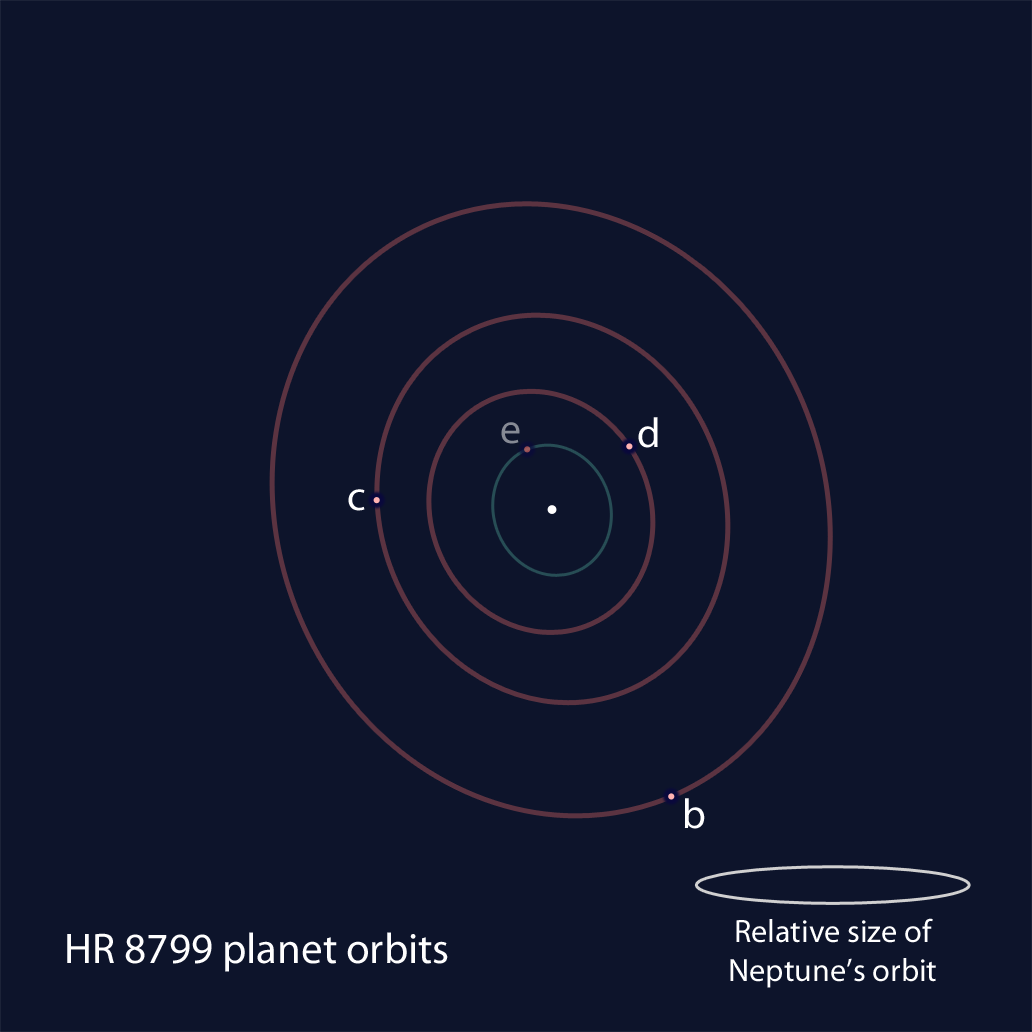

Positional schmatic of the members of the HR 8799 exoplanet system

This is an illustration of the HR 8799 exoplanet system based on the reanalysis of Hubble NICMOS data and ground-based observations. The positions of the star and the orbits of the four known planets are shown schematically. The sizes of the dots are not to scale with the planet's true sizes. The three outermost planets, b, c, and d, are detected in both the NICMOS and ground-based data. A fourth, inner planet, e, was detected in ground-based observations. The orbits appear elongated because of a slight tilt of the plane of the orbits relative to our line of sight. The size of the HR 8799 planetary system is comparable to our Solar System, as indicated by the orbit of Neptune, shown to scale.

Credit: NASA, ESA, and R. Soummer (STScI)